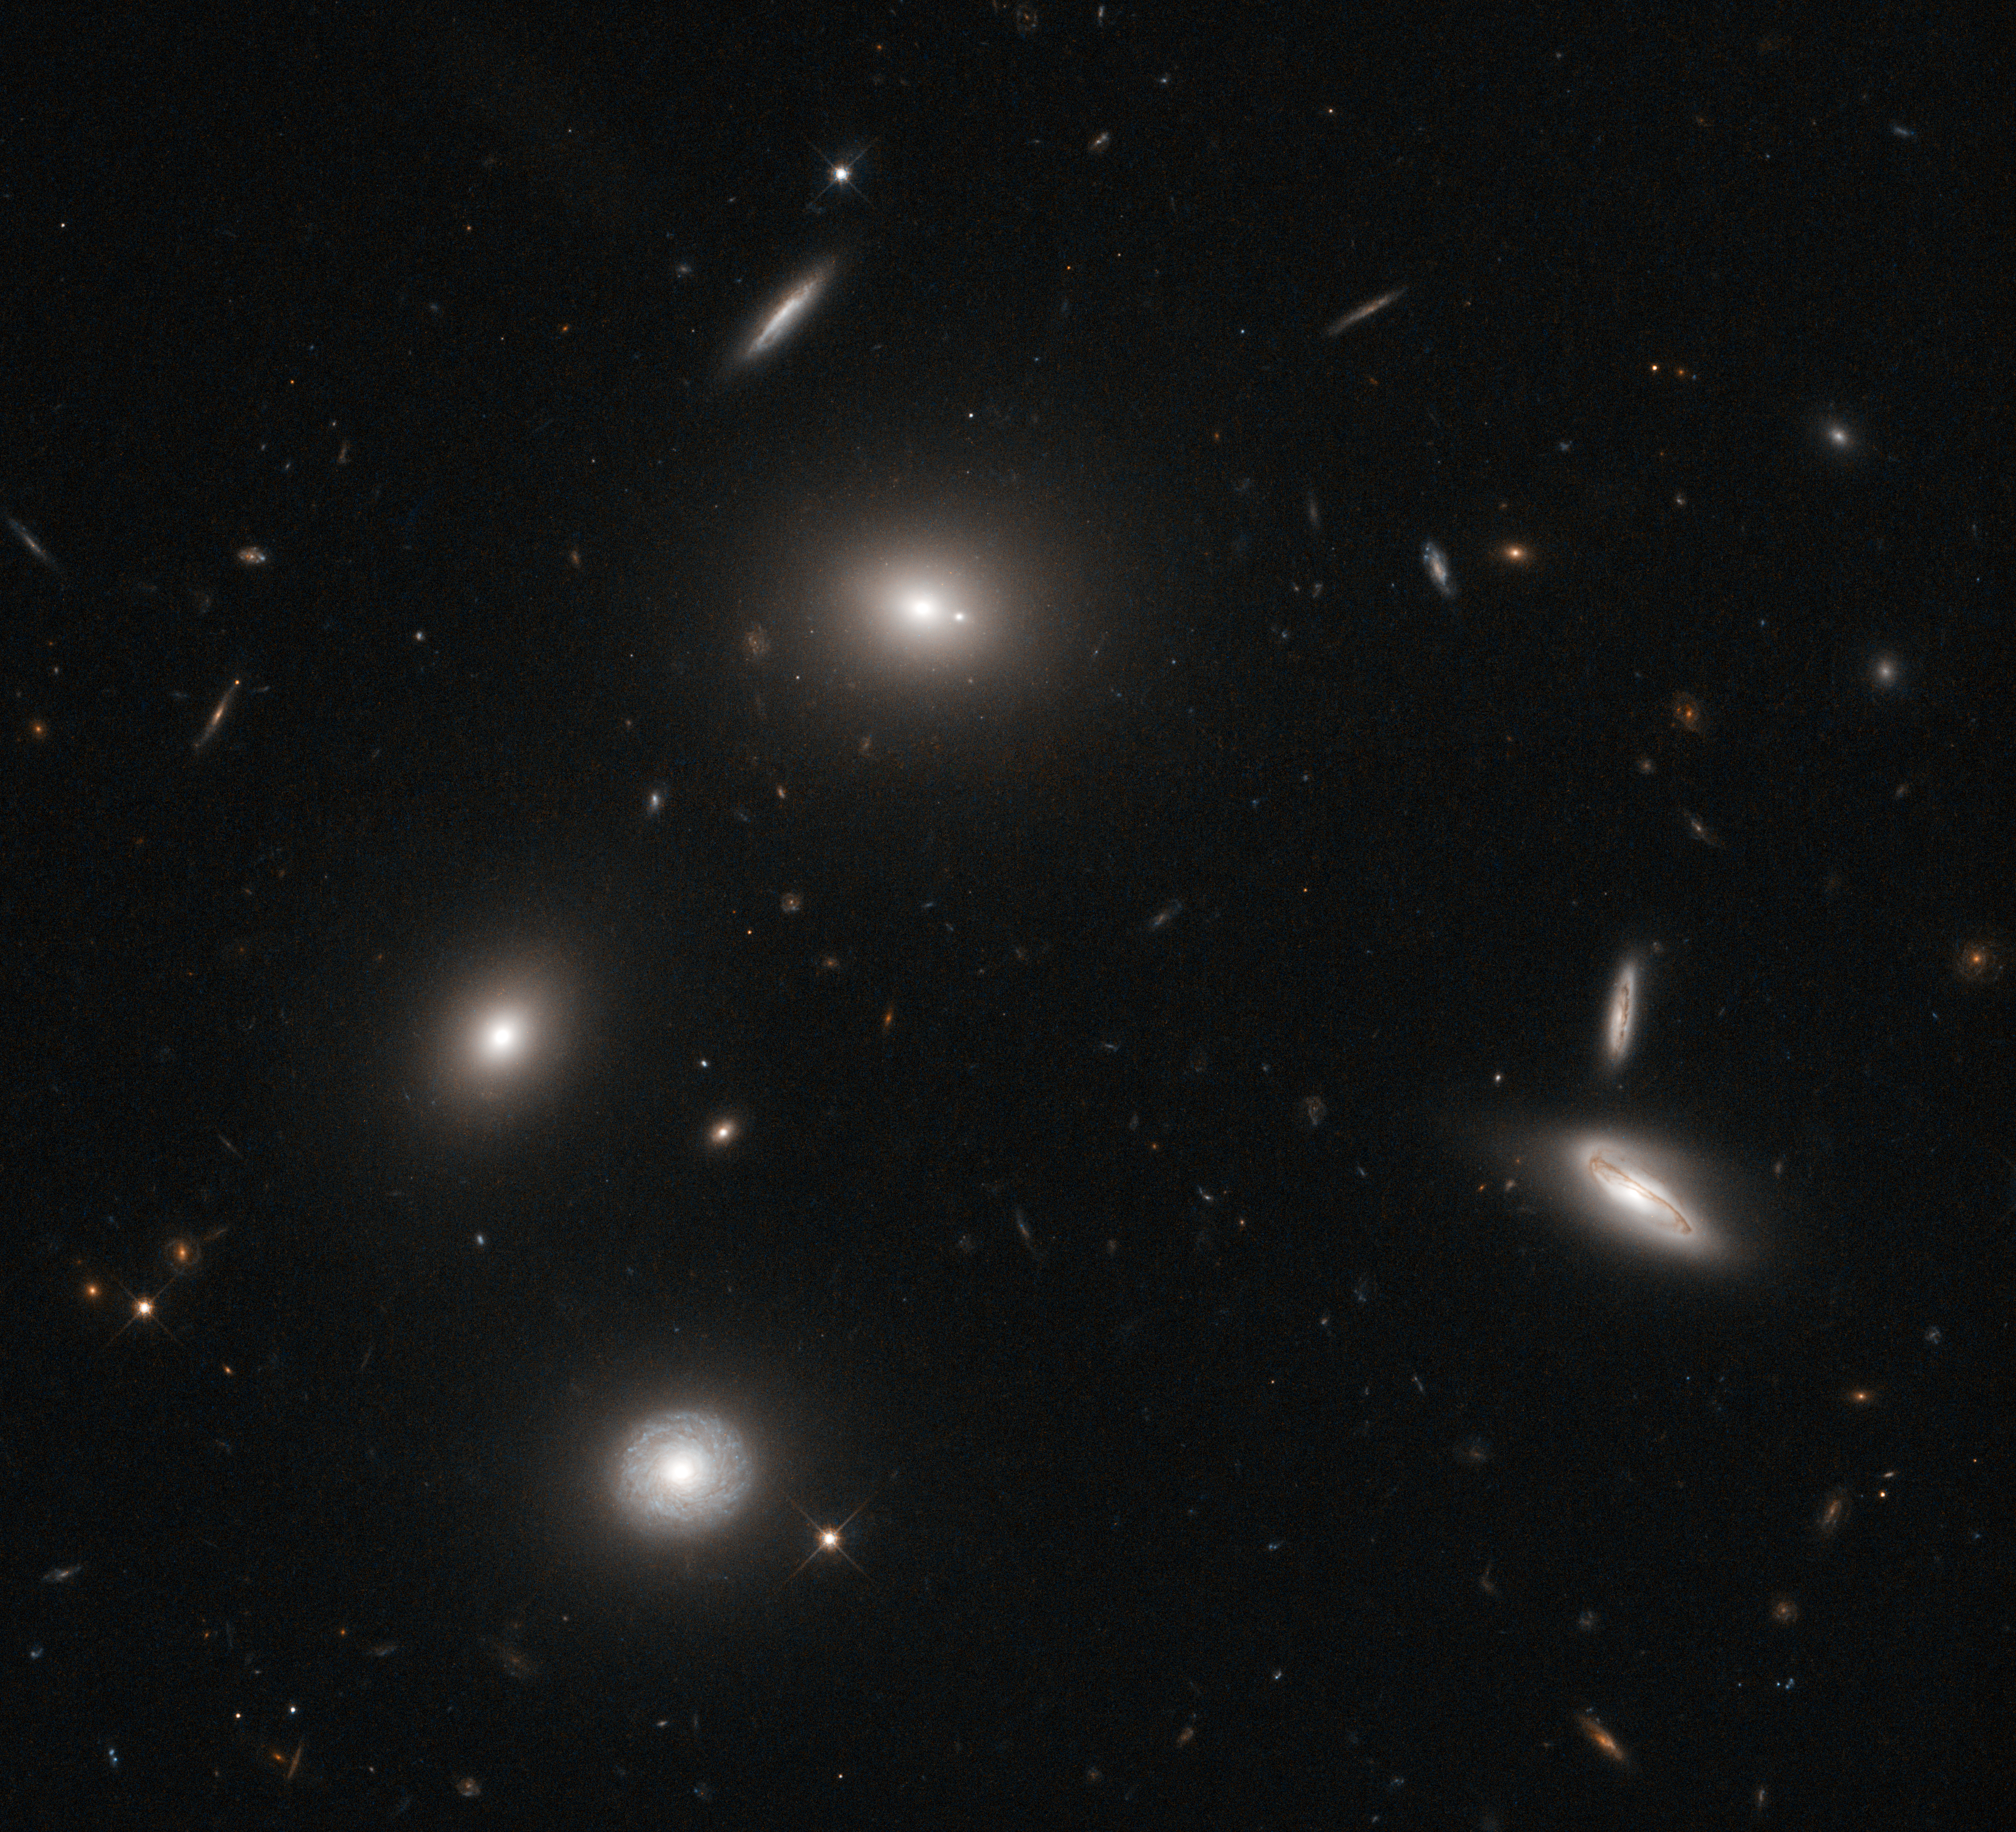

Galactic fireflies

Luminous galaxies glow like fireflies on a dark night in this image snapped by the NASA/ESA Hubble Space Telescope. The central galaxy in this image is a gigantic elliptical galaxy designated 4C 73.08. A prominent spiral galaxy seen from "above" shines in the lower part of the image, while examples of galaxies viewed edge-on also populate the cosmic landscape.

In the optical and near-infrared light captured to make this image, 4C 73.08 does not appear all that beastly. But when viewed in longer wavelengths the galaxy takes on a very different appearance. Dust-piercing radio waves reveal plumes emanating from the core, where a supermassive black hole spews out twin jets of material. 4C 73.08 is classified as a radio galaxy as a result of this characteristic activity in the radio part of the electromagnetic spectrum.

Astronomers must study objects such as 4C 73.08 in multiple wavelengths in order to learn their true natures, just as seeing a firefly’s glow would tell a scientist only so much about the insect. Observing 4C 73.08 in visible light with Hubble illuminates galactic structure as well as the ages of constituent stars, and therefore the age of the galaxy itself. 4C 73.08 is decidedly redder than the prominent, bluer spiral galaxy in this image. The elliptical galaxy’s redness comes from the presence of many older, crimson stars, which shows that 4C 73.08 is older than its spiral neighbour.

The image was taken using Hubble’s Wide Field Camera 3 through two filters: one which captures green light, and one which captures red and near-infrared light.

Credit: ESA/Hubble & NASA